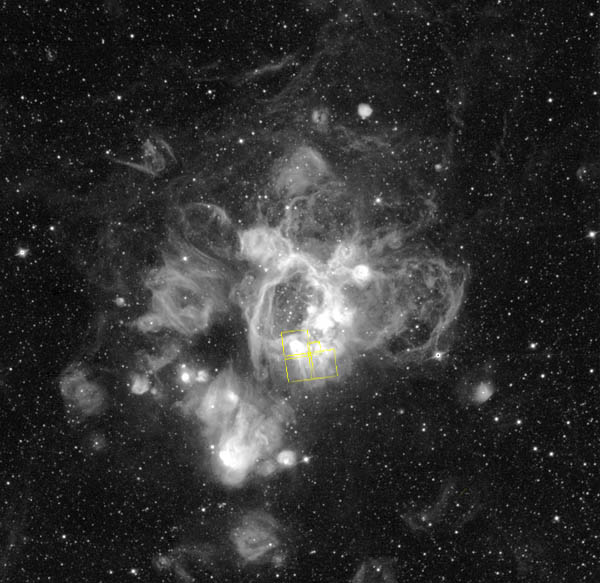

Gaseous streamers flutter in stellar breeze

Ground-based H-alpha image of the entire N44 Complex in the Large Magellanic Cloud taken at the Curtis Schmidt Telescope at the Cerro Tololo Inter-American Observatory in Chile by R. Chris Smith.

Credit: R. Chris Smith (CTIO)